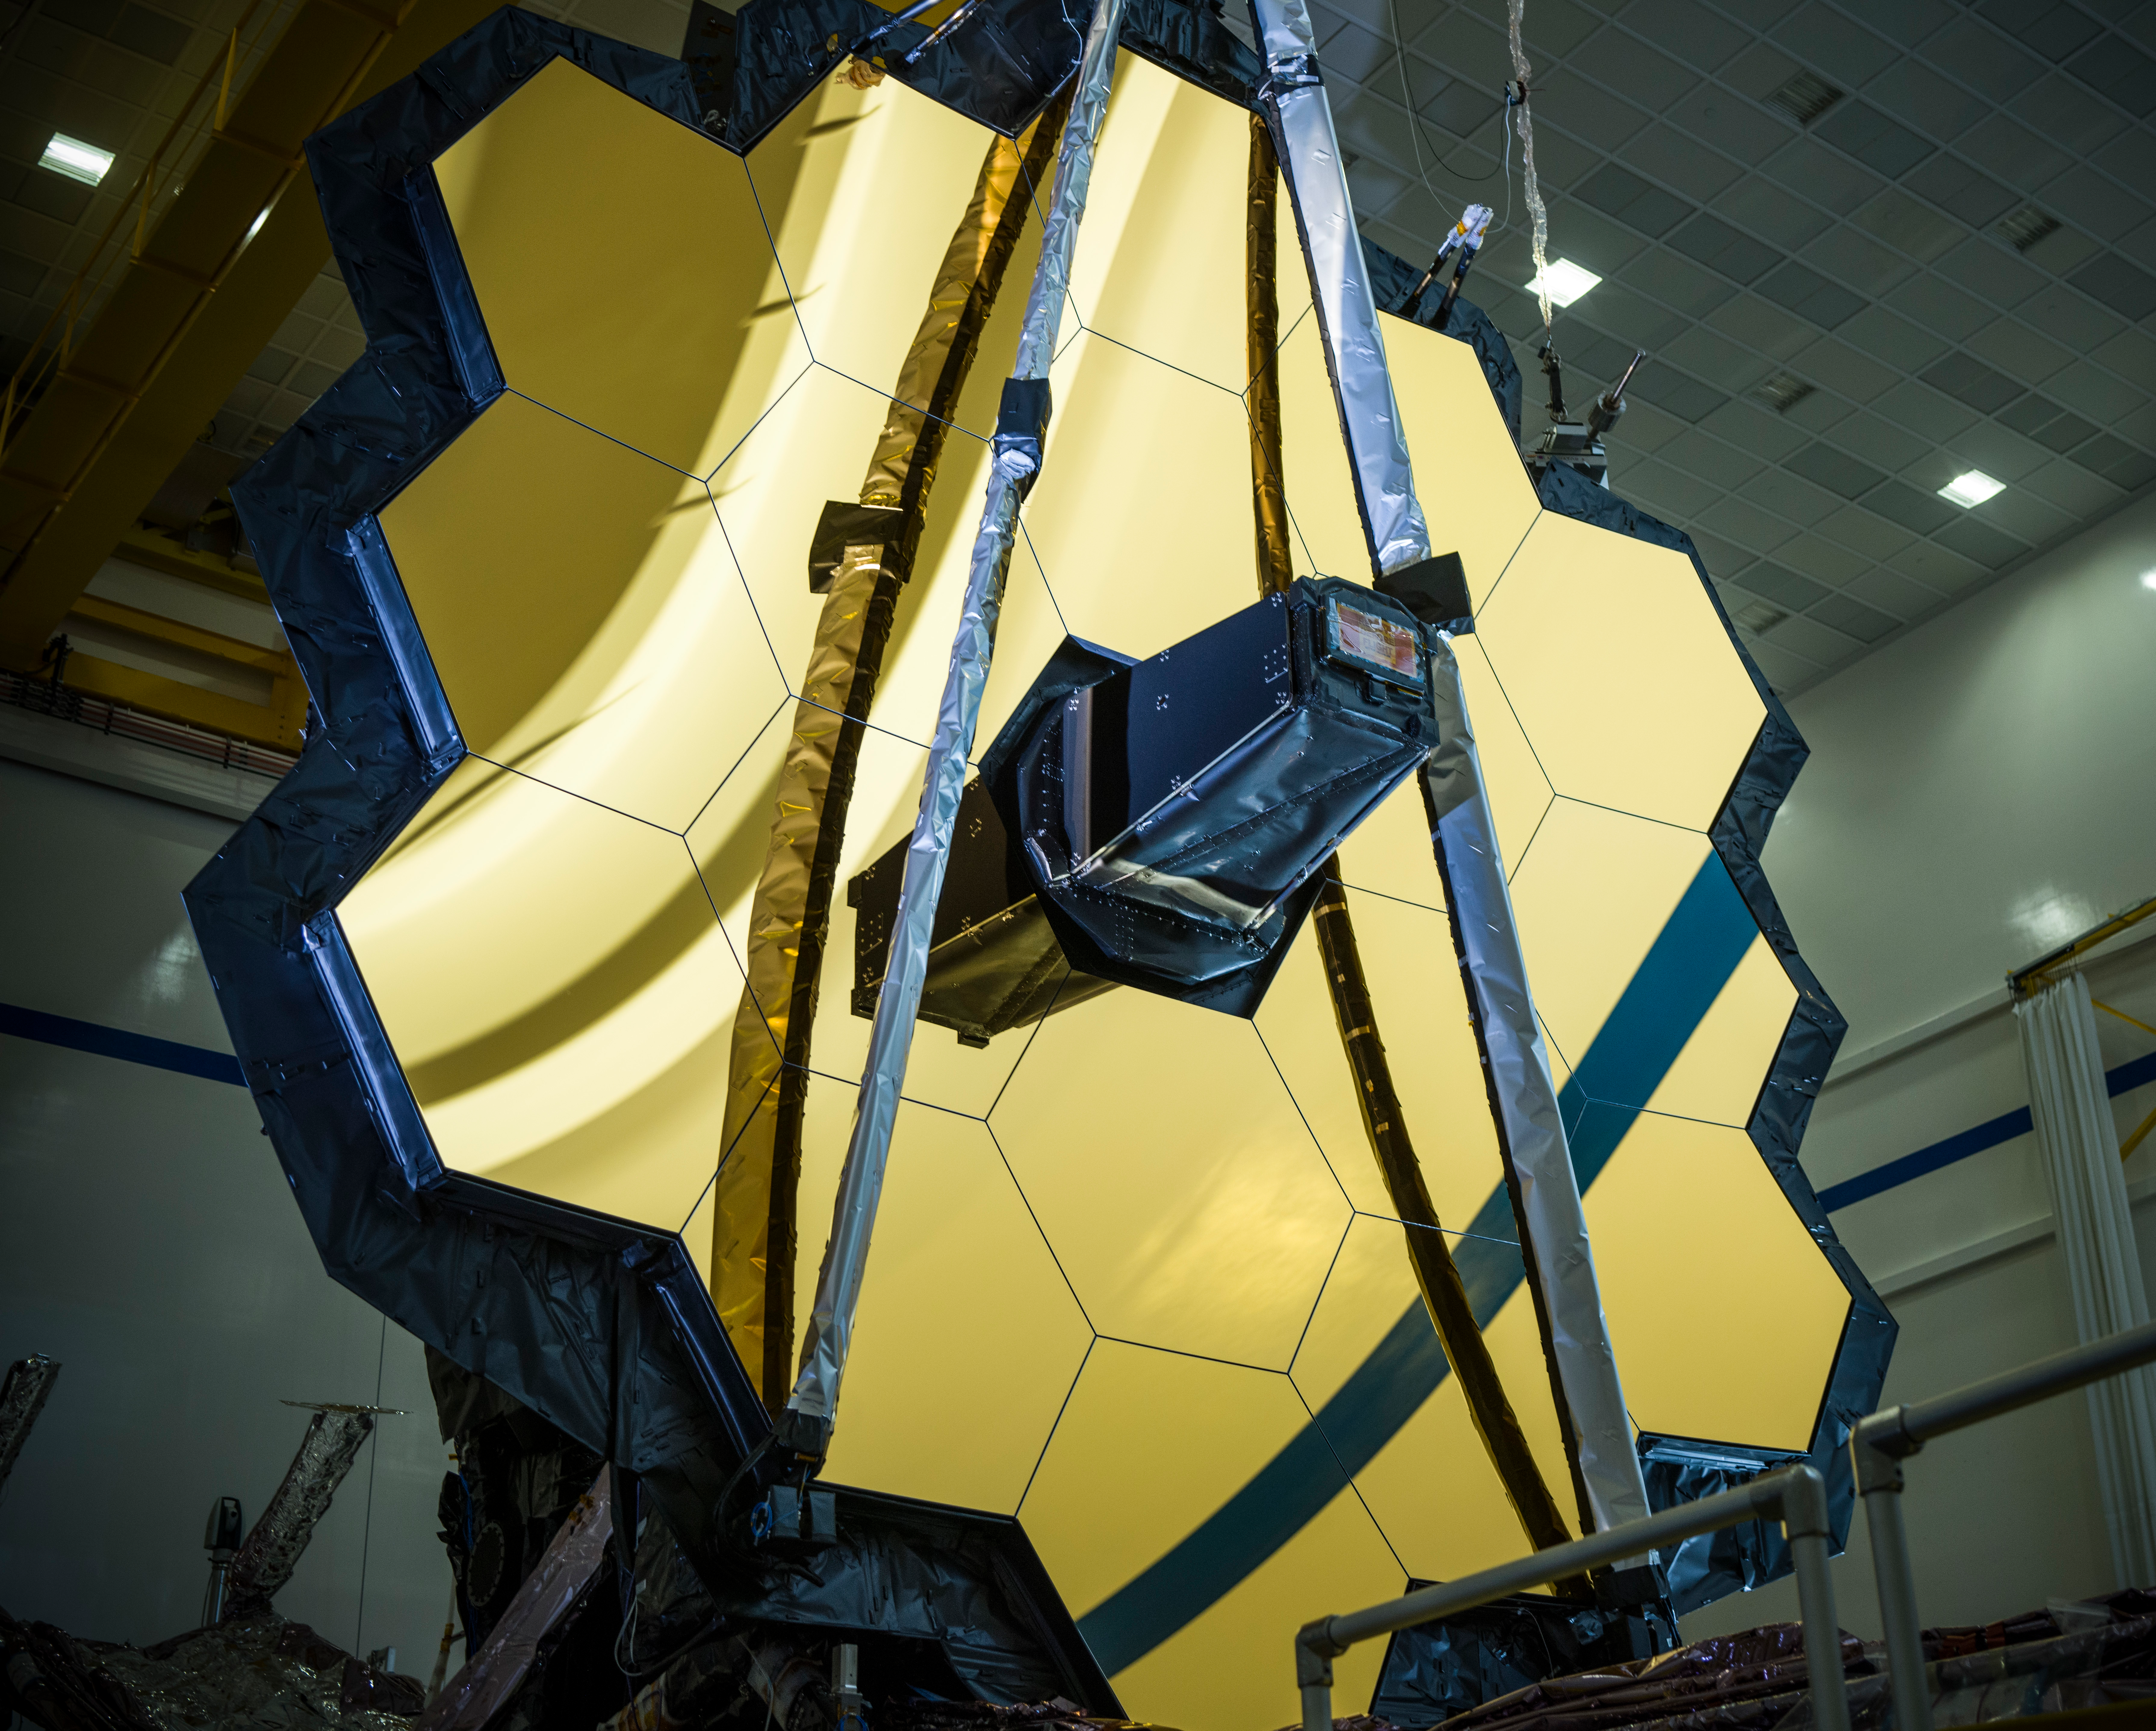

Webb in the Northrop Grumman cleanroom

Now that NASA’s James Webb Space Telescope has been assembled into its final form, testing teams seized the unique opportunity to perform a critical software and electrical analysis on the entire observatory as a single, fully connected vehicle.

Known as a Comprehensive Systems Test or CST, this was the first full systems evaluation that has ever been run on the assembled observatory, and one of the final first-time activities the team will perform. Similar performance evaluations have been completed in Webb’s history, using simulations and surrogates to infer data about pieces of the spacecraft that had not yet been assembled. Now that Webb is fully built, simulations and simulators are no longer needed, and engineers can confidently assess both its software and electronic performance.

More on this critical testing milestone here: go.nasa.gov/32f9KhQ

Credit: NASA/Chris Gunn